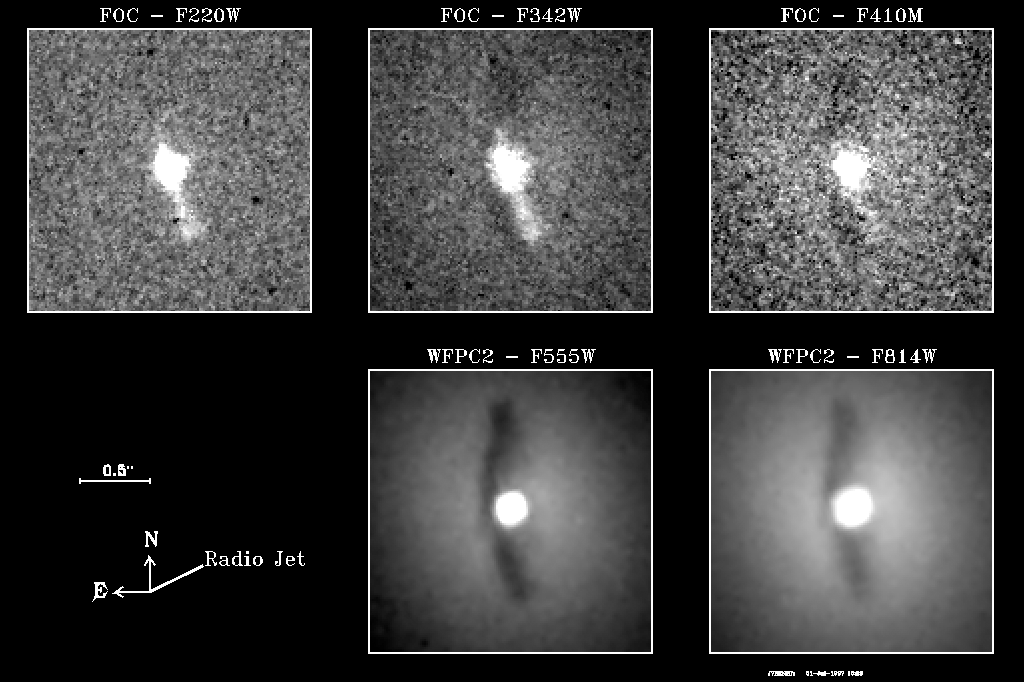

Individual images that were used to create a HST colour composite

These images were used to produce the composite HST images that goes under the name 'Galaxy NGC 6251 Nucleus'

Credit: Philippe Crane (European Southern Observatory) and NASA/ESA